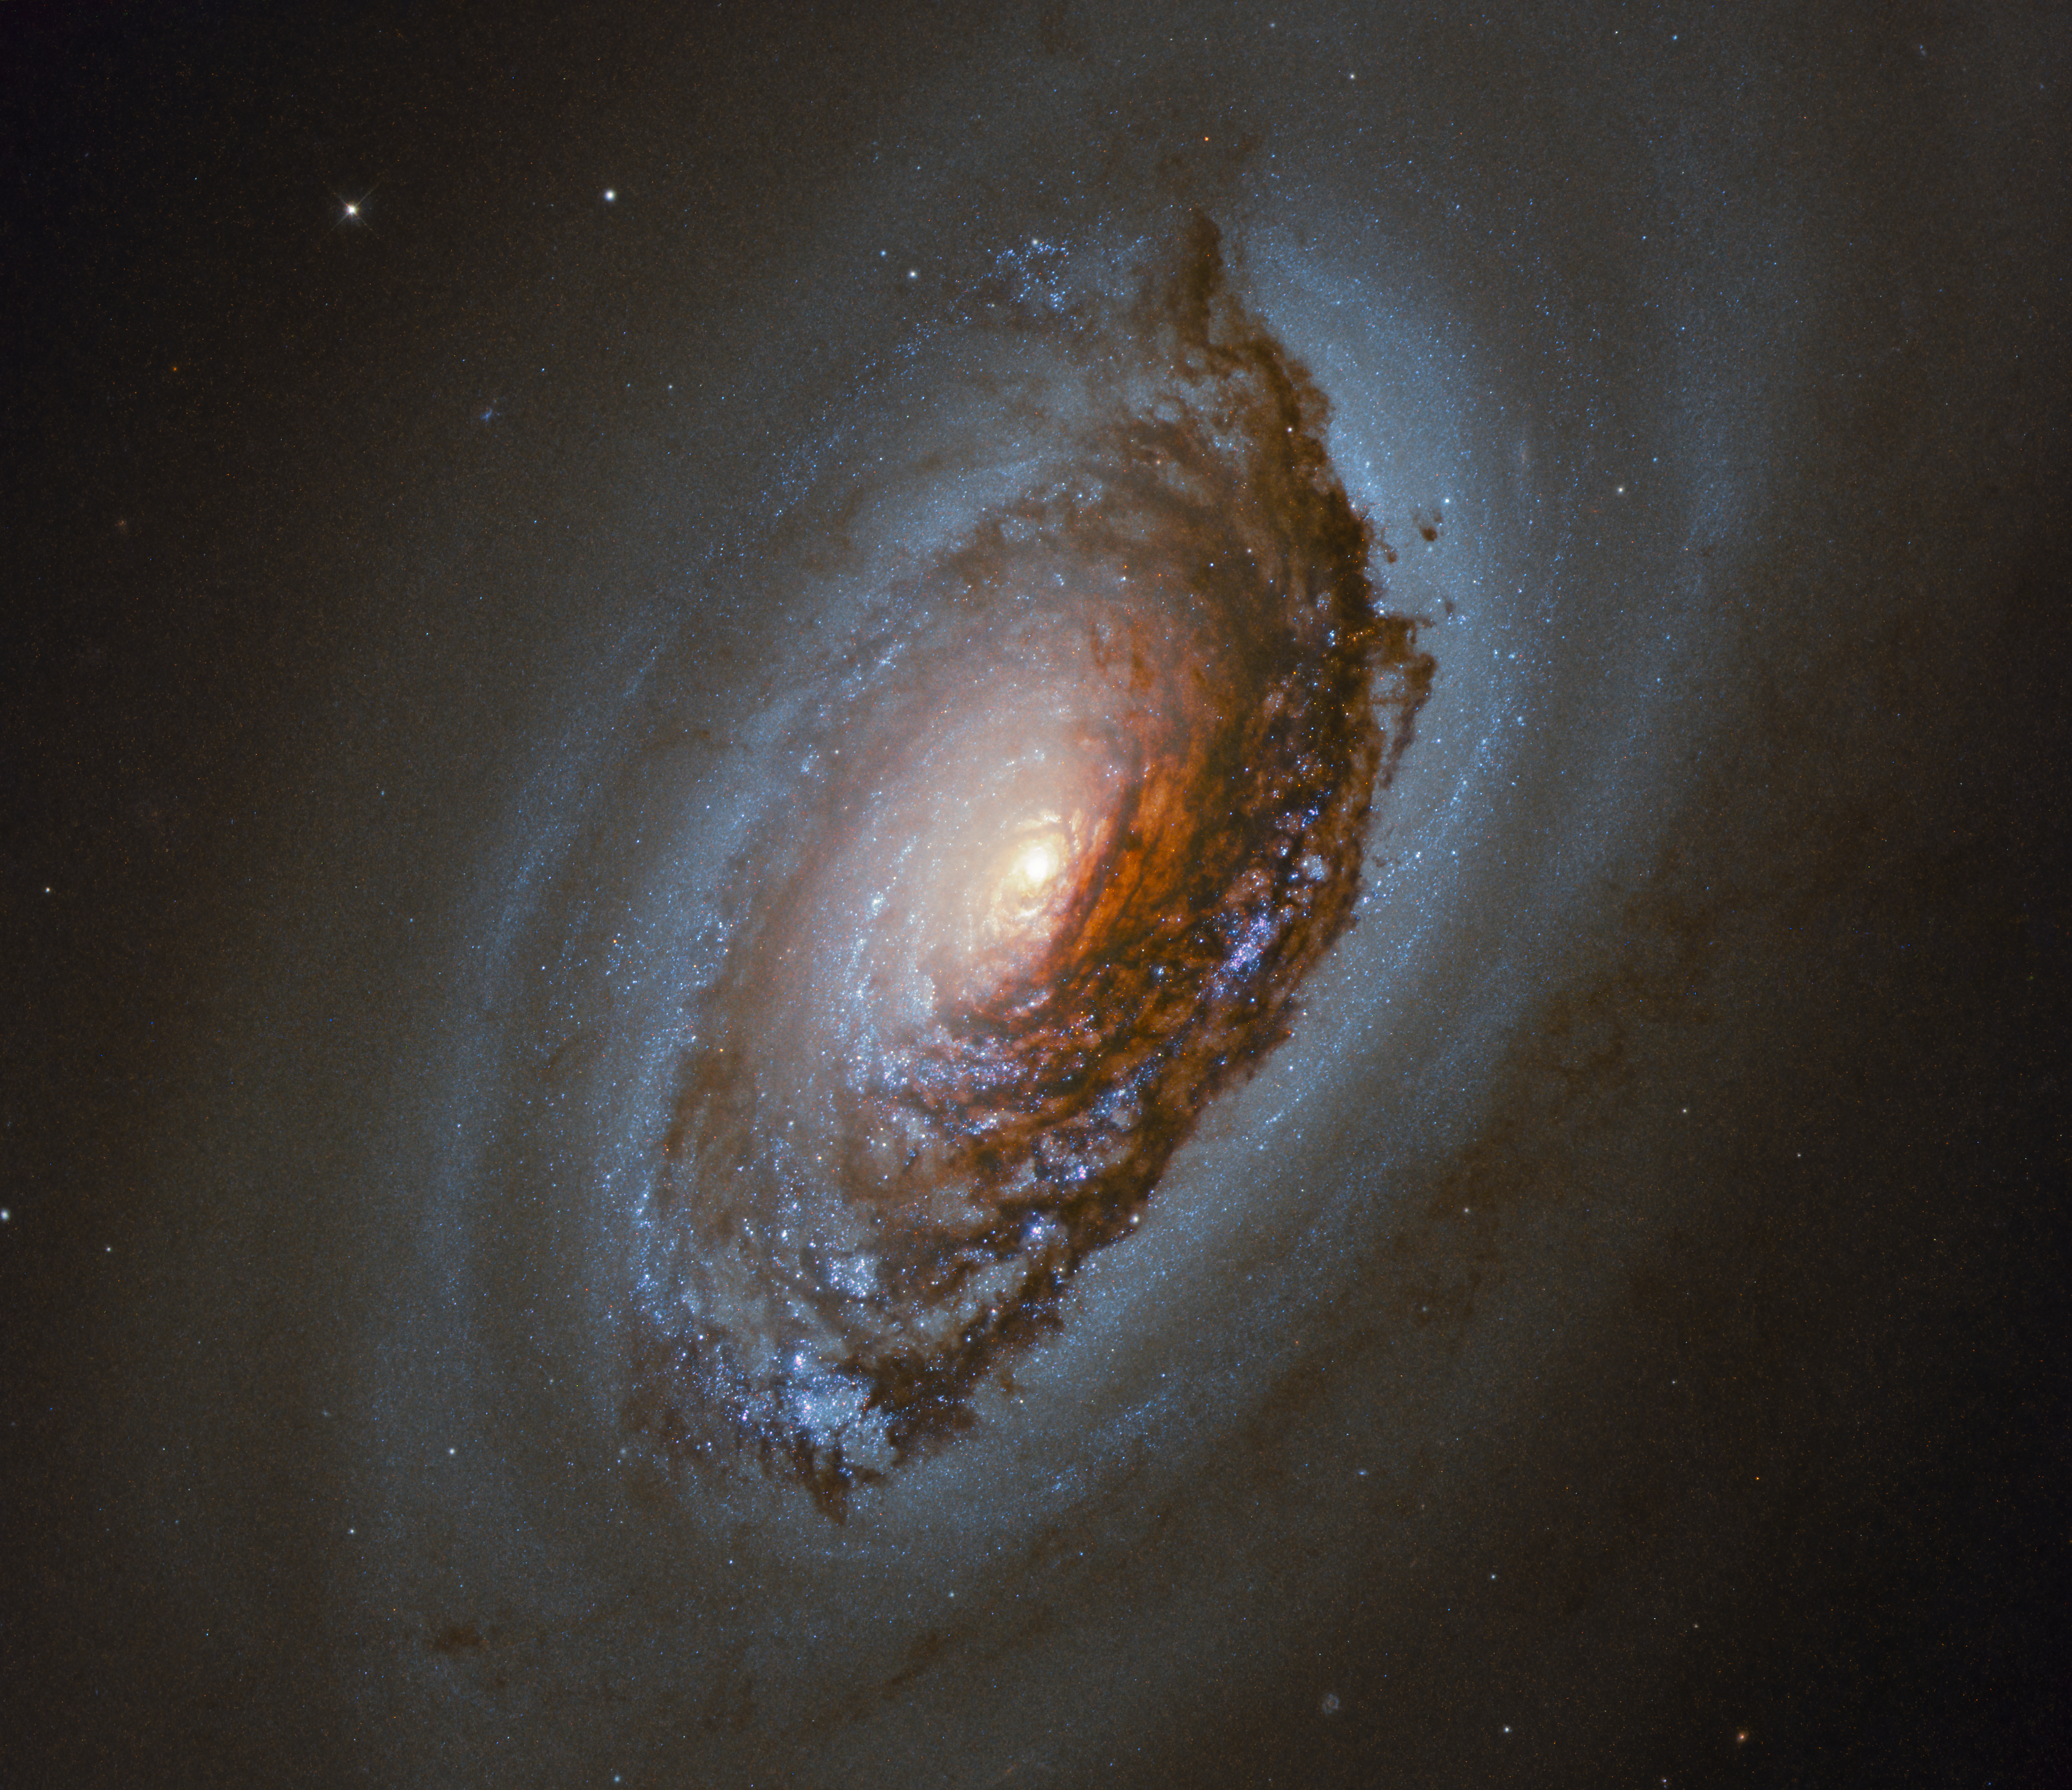

Eye in the Sky

This NASA/ESA Hubble Space Telescope Picture of the Week features NGC4826 — a spiral galaxy located 17 million light-years away in the constellation of Coma Berenices (Berenice’s Hair). This galaxy is often referred to as the “Black Eye”, or “Evil Eye”, galaxy because of the dark band of dust that sweeps across one side of its bright nucleus.

NGC4826 is known by astronomers for its strange internal motion. The gas in the outer regions of this galaxy and the gas in its inner regions are rotating in opposite directions, which might be related to a recent merger. New stars are forming in the region where the counter rotating gases collide.

This galaxy was first discovered in 1779 by the English astronomer Edward Pigott.

Credit: ESA/Hubble & NASA, J. Lee and the PHANGS-HST Team Acknowledgement: Judy Schmidt